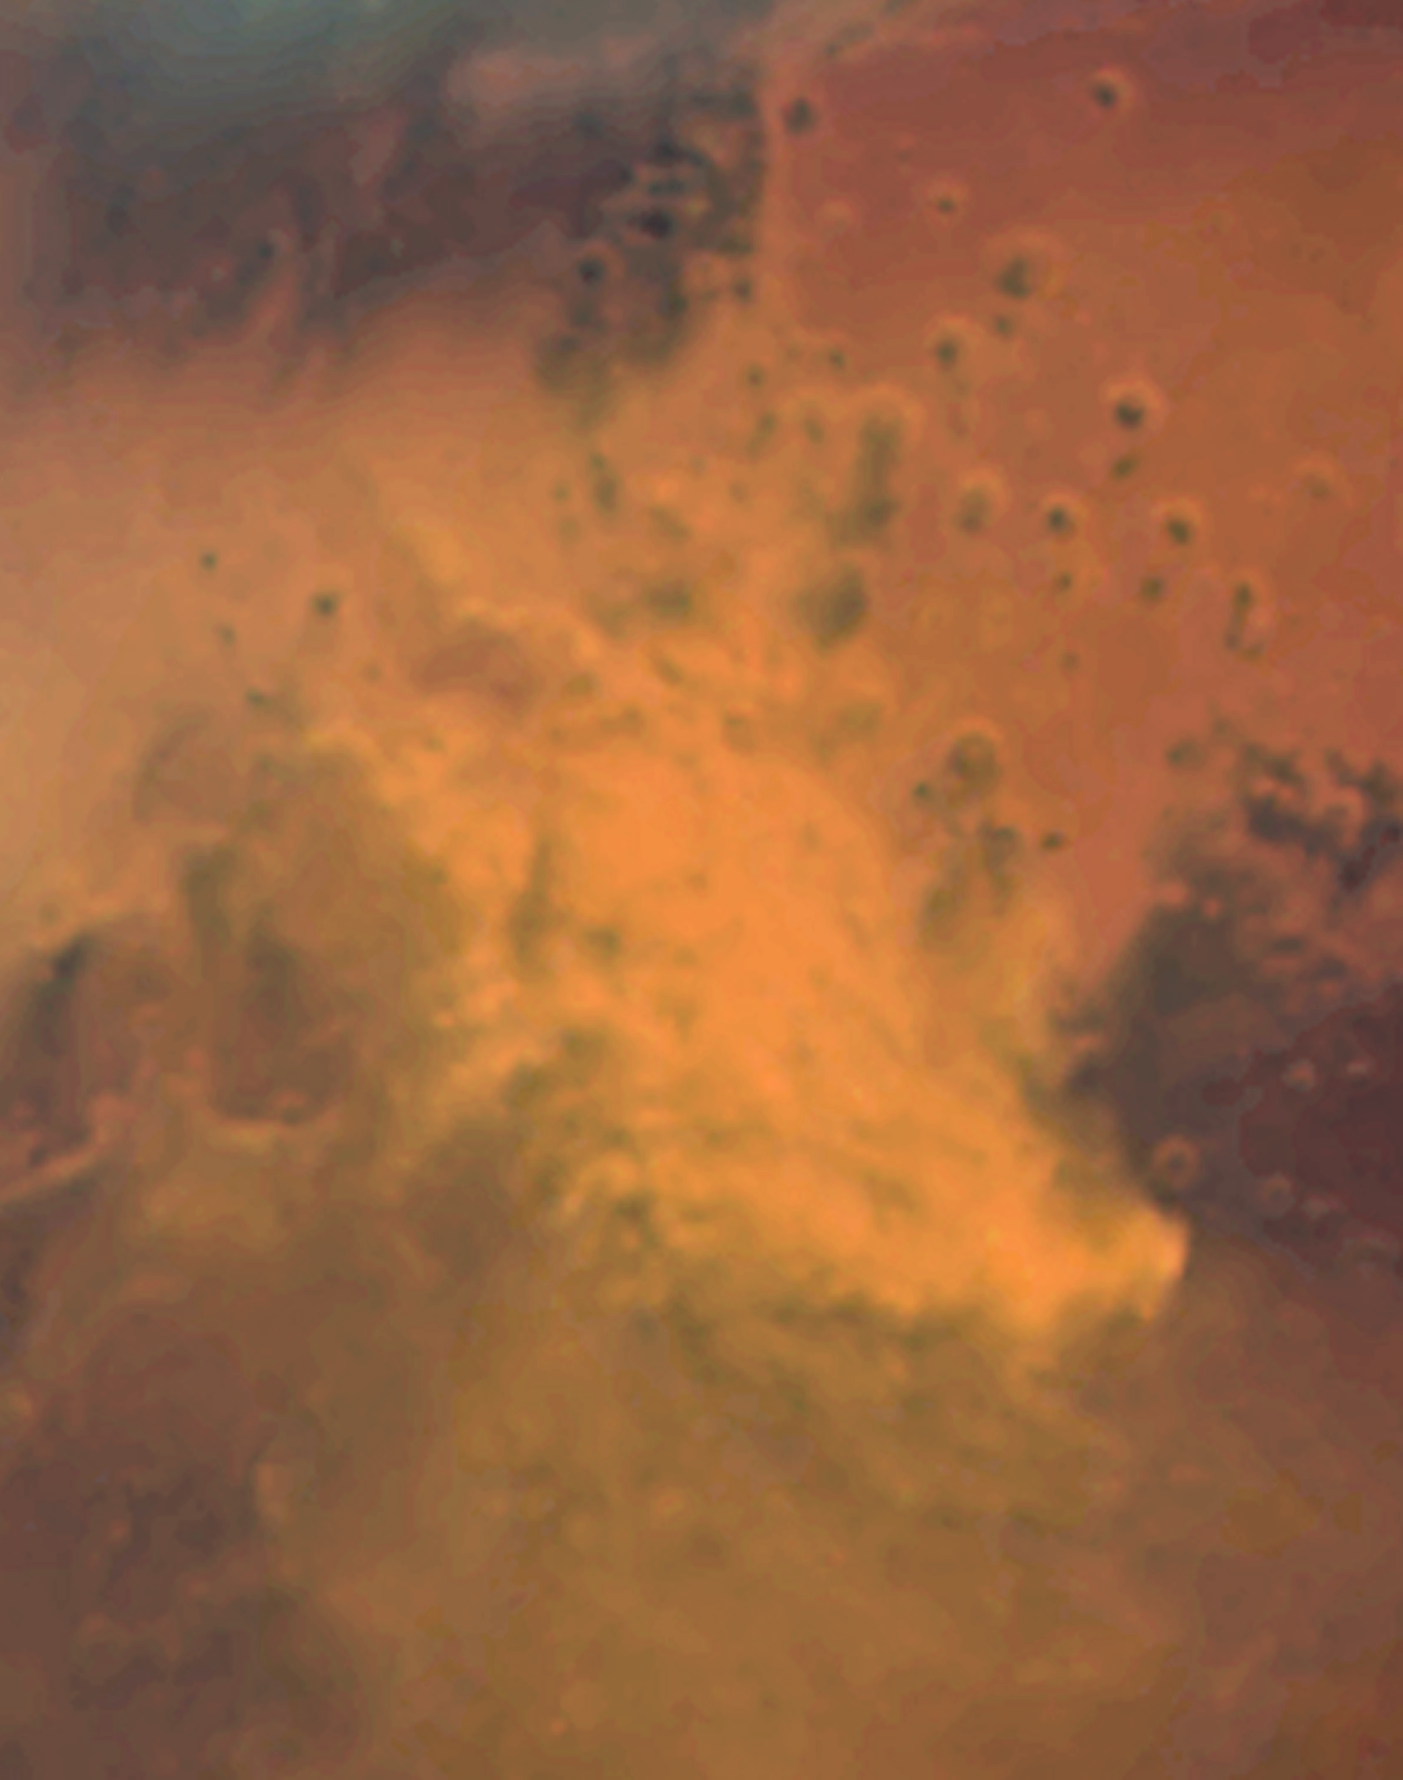

Mars dust storm: October 28, 2005 (ACS/HRC)

Hubble images of the Sinus Meridiani region taken on October 28, 2005 show evidence of a regional dust storm. A comparable Hubble image taken on June 26, 2001 of the same region shows a storm-free environment. The dust storm, which is about 930 miles (1500 km) long, is about the size of the states of Texas, Oklahoma, and New Mexico combined. Ground-based amateur telescopes have been watching the storm grow and evolve.

Credit: NASA, ESA, The Hubble Heritage Team (STScI/AURA), J. Bell (Cornell University) and M. Wolff (Space Science Institute)